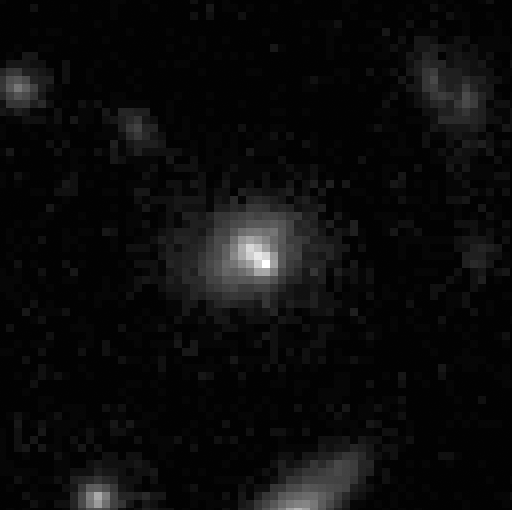

Supernova 1996cl in Distant Cluster

In March 1996, the Hubble Space Telescope's Wide Field and Planetary Camera 2just happened to be pointed at the faraway galaxy cluster MS1054-0321 when it captured the light from an exploding star, called supernova 1996cl. The cluster is 8 billion light-years from Earth.

Credit: Saul Perlmutter of Lawrence Berkeley Laboratory in California